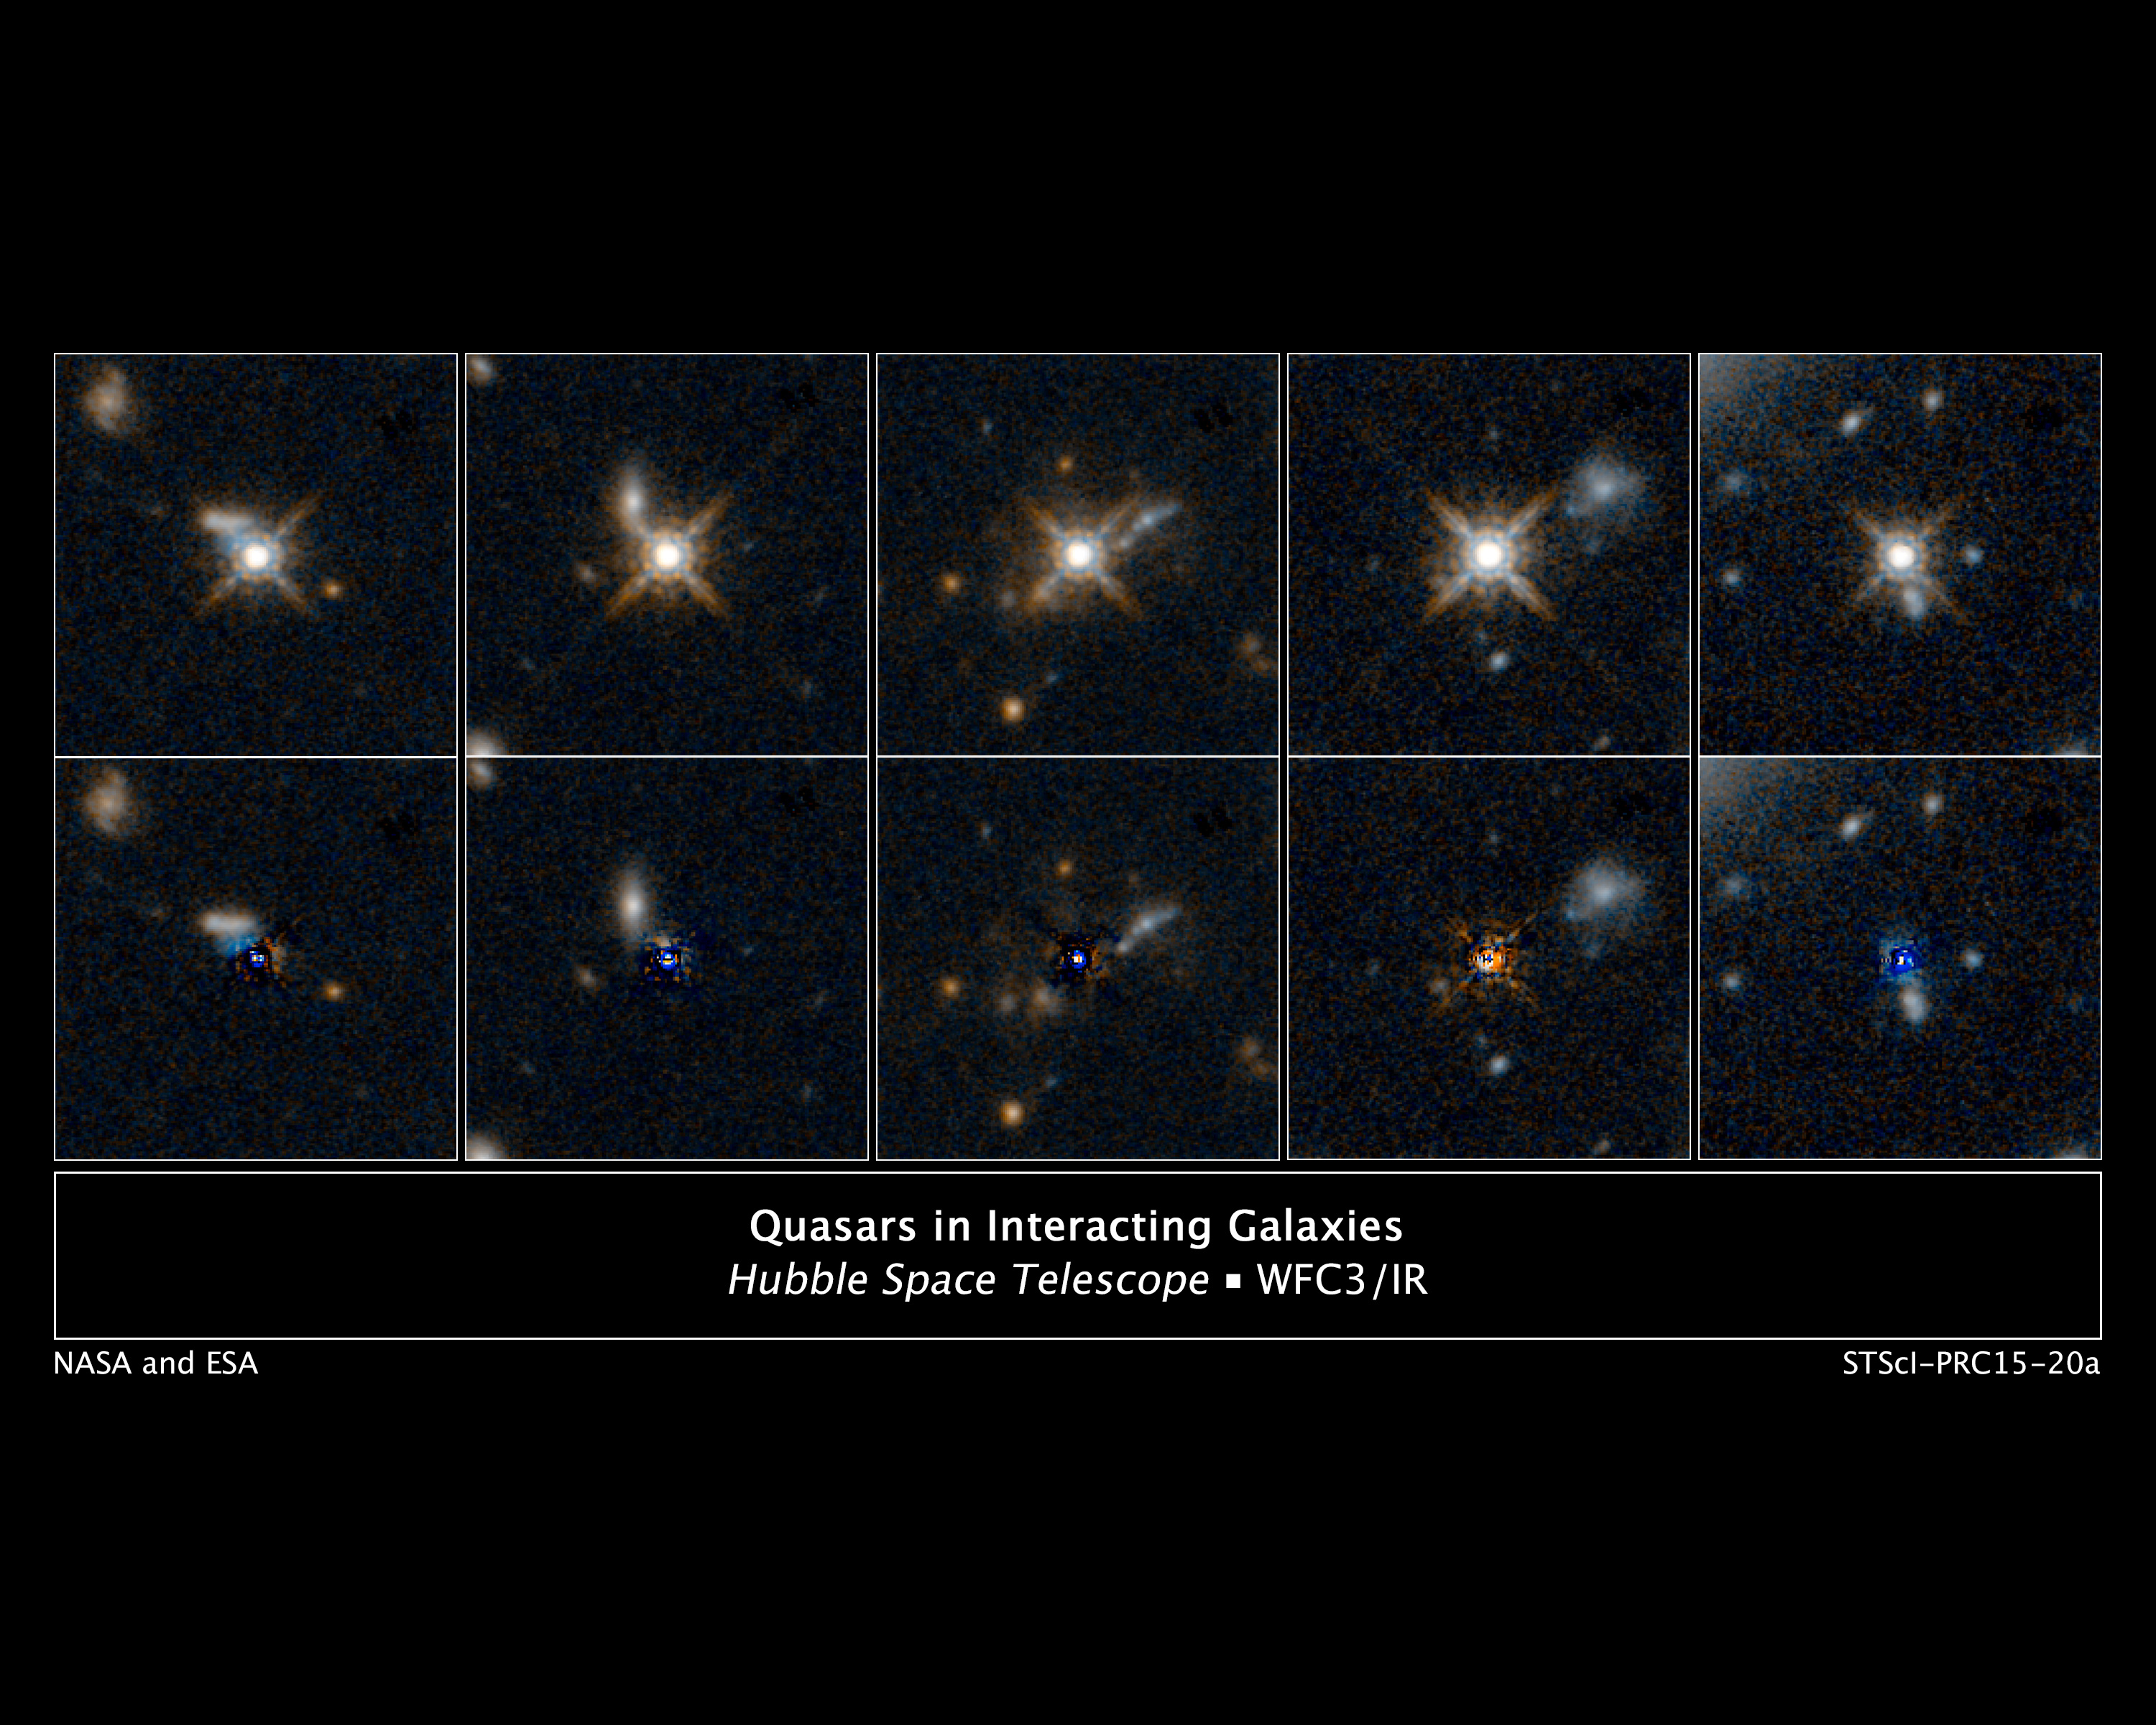

Quasars in interacting galaxies

[Top Row]
This is a selection of photos from a Hubble Space Telescope survey of 11 ultra-bright quasars that existed at the peak of the universe's star-formation era, which was 12 billion years ago. The quasars (powered by supermassive black holes) are so compact and bright they make a diffraction-spike pattern in the telescope's optics - an optical artifact typically only produced by bright nearby stars. Despite their brightness, the quasars are actually dimmed by dusty gas around them. The infrared capability of Hubble's Wide Field Camera 3 was able to probe deeply into the material around the quasars.

[Bottom Row]
When the glare of the quasar is subtracted, researchers see evidence for collisions between galaxies. The collisions and mergers gave birth to the quasars by fueling the supermassive black hole at the core of the galaxies. The new images capture the dust-clearing transitional phase in the merger-driven quasar birth. These observations show that the brightest quasars in the universe live in merging galaxies.

Credit: NASA, ESA, and E. Glikman (Middlebury College, Vermont)